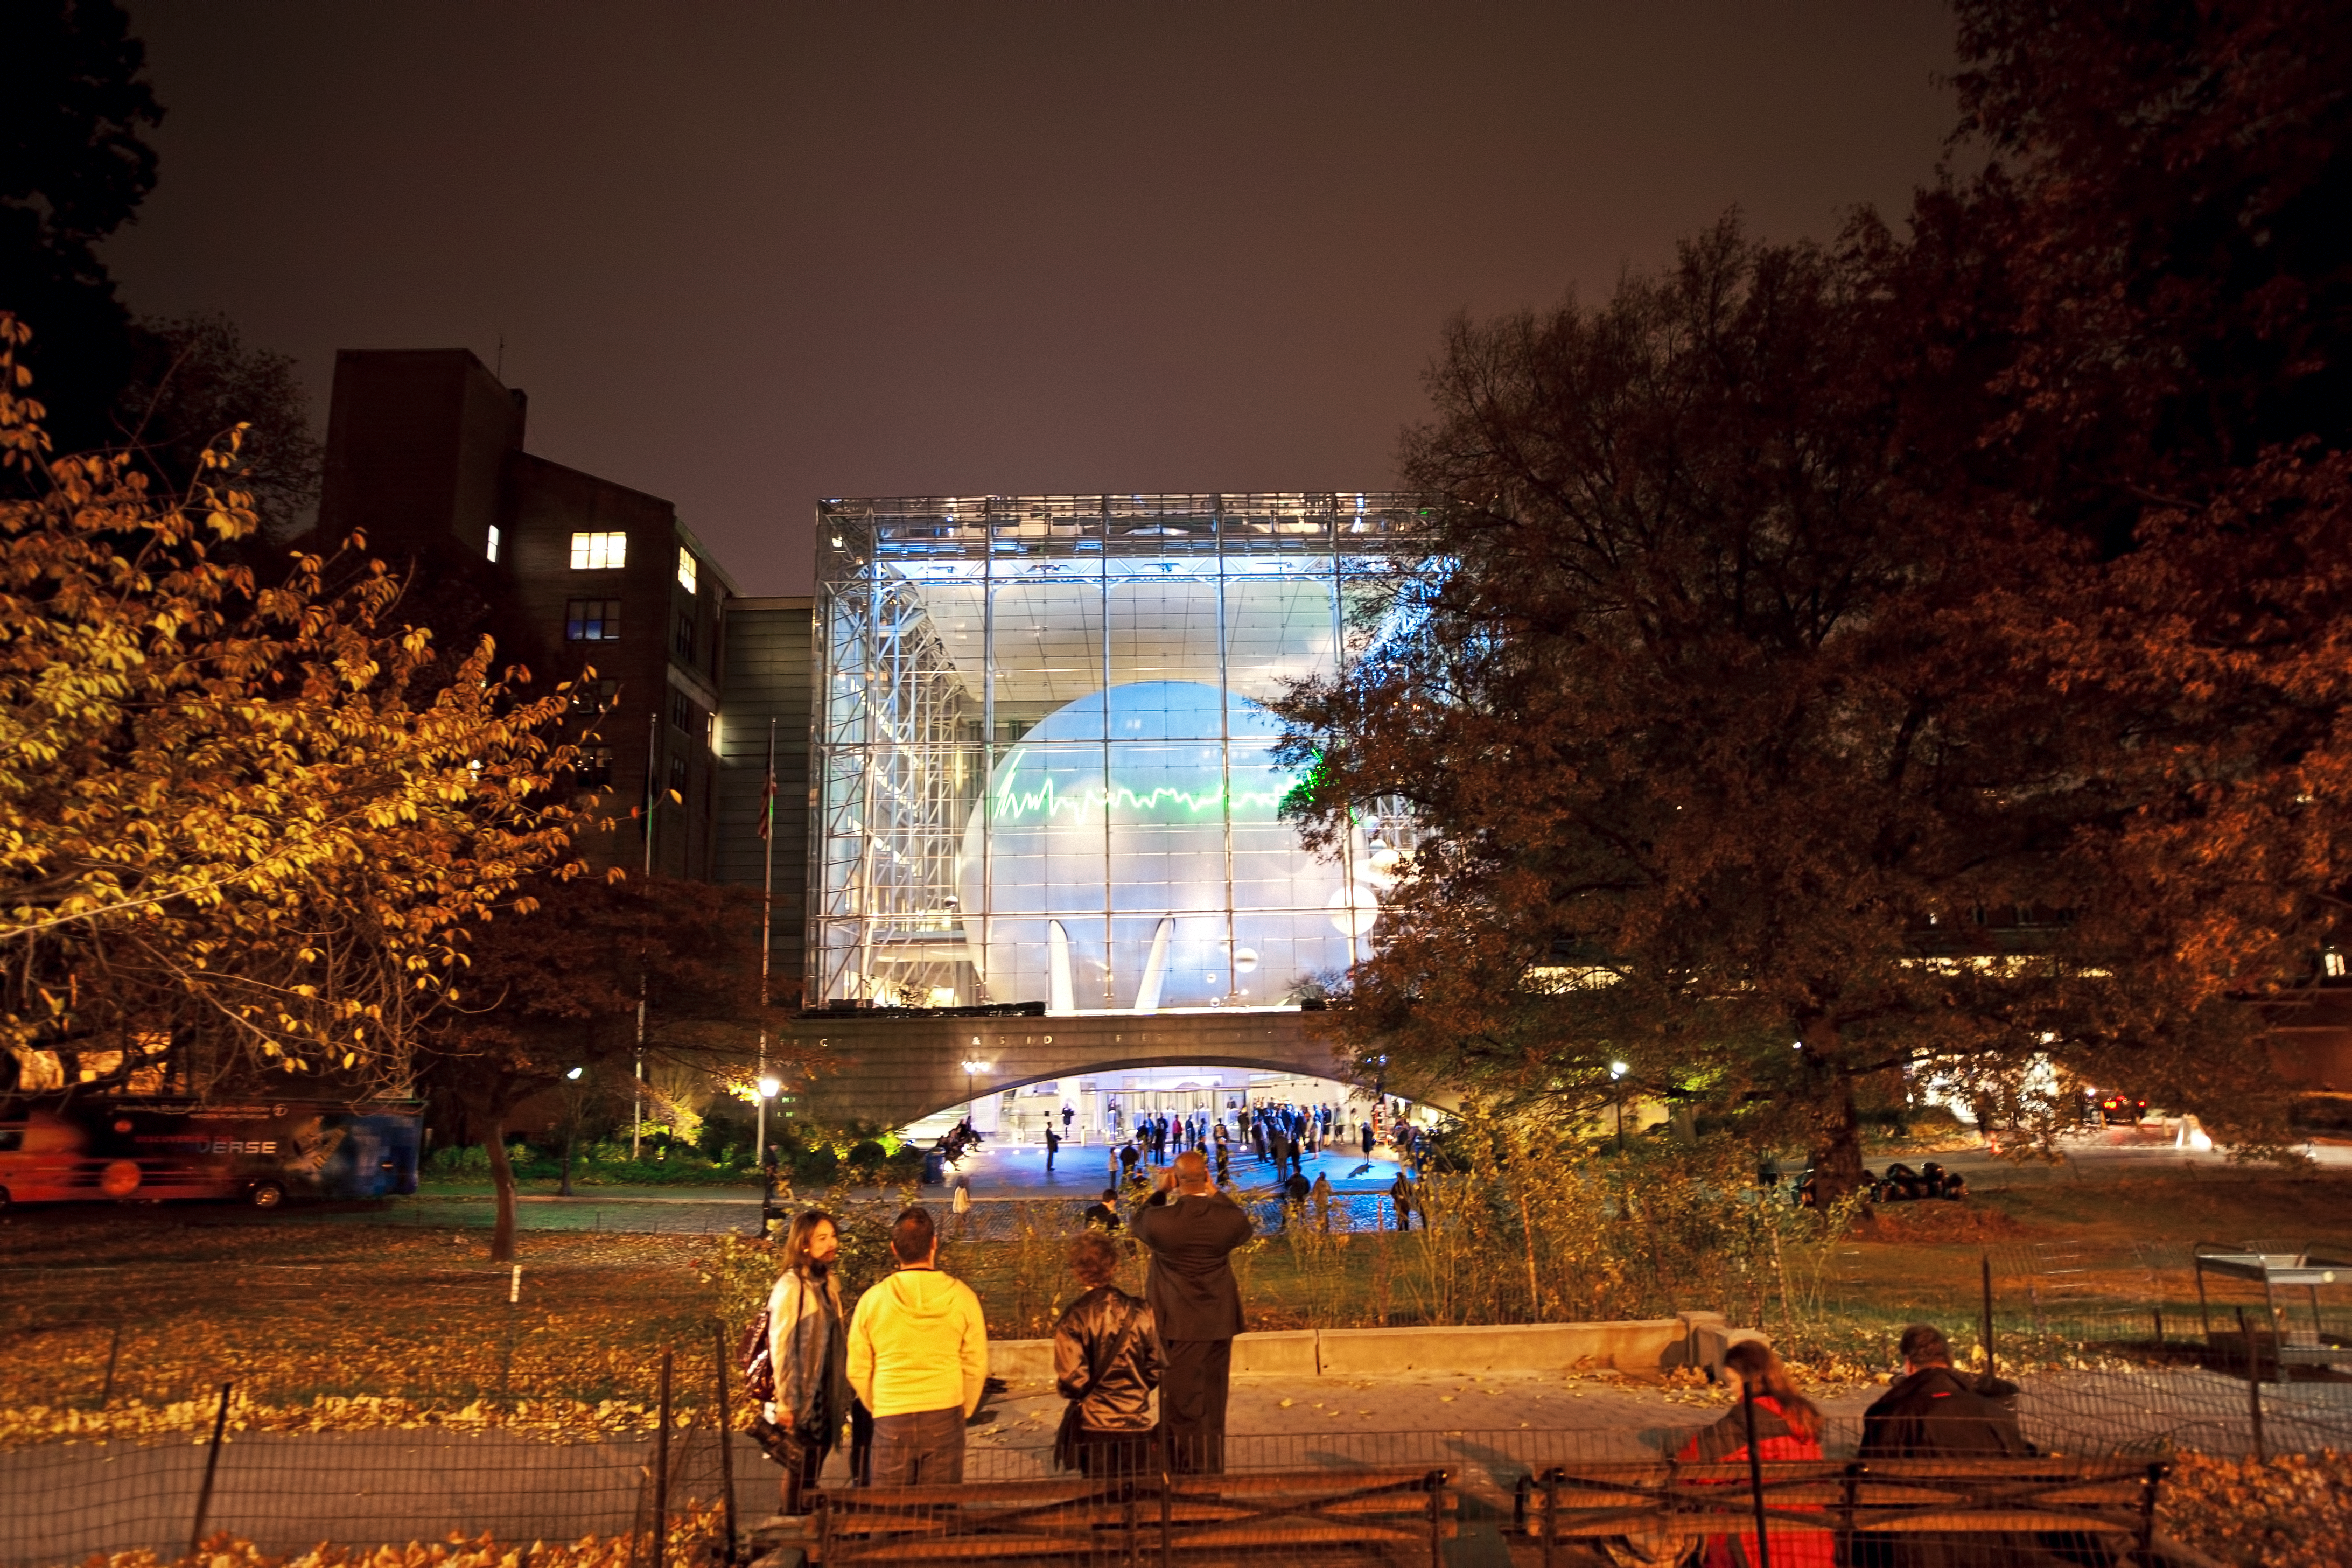

From the distant past

This image shows From the Distant Past, a laser installation by German conceptual artist Tim Otto Roth, as it is projected onto the dome of New York’s Hayden Planetarium. The installation shows spectra (graphs that represent the brightness and colours of astronomical objects) collected by the NASA/ESA Hubble Space Telescope, projected using a green scanning laser. These spectra include data from distant galaxies whose light has taken billions of years to reach us.

Credit: ESA/Hubble, AMNH